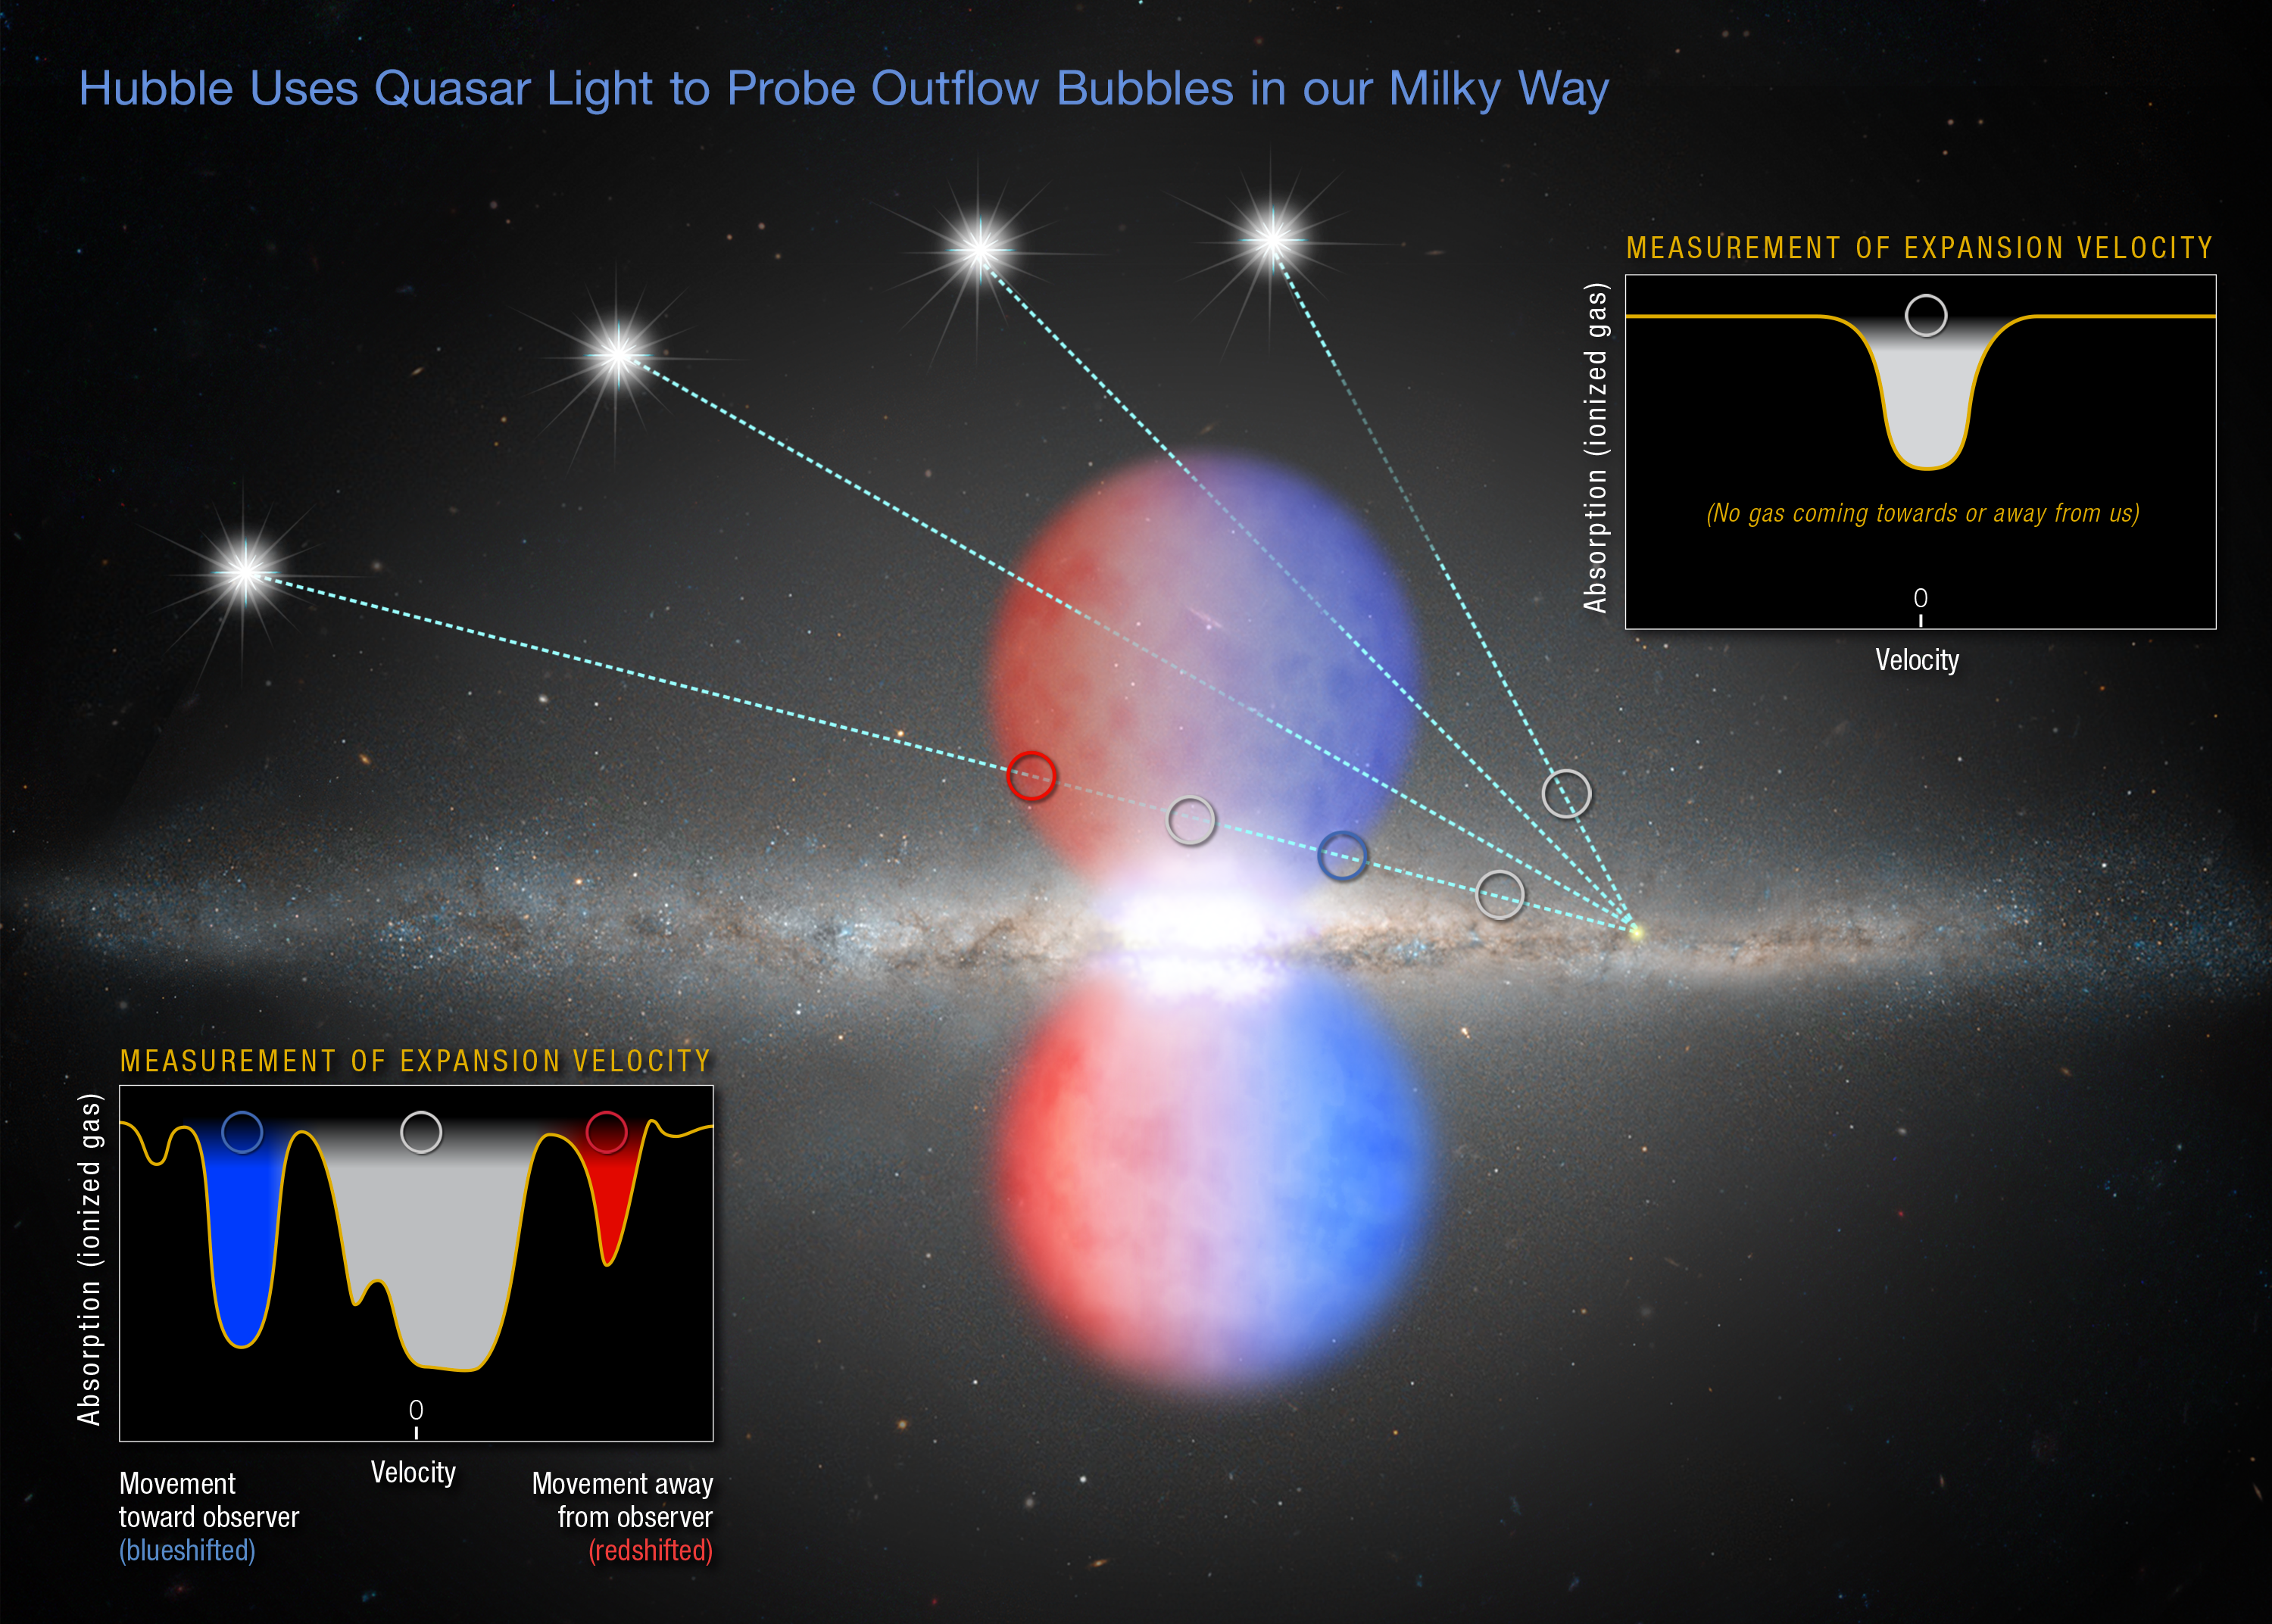

Quasar’s light yields clues to outflow

This artist’s impression shows the light of several distant quasars piercing the northern half of the Fermi Bubbles, an outflow of gas expelled by the supermassive black hole in the centre of the Milky Way. The NASA/ESA Hubble Space Telescope probed the quasars’ light for information on the speed of the gas and whether the gas is moving toward or away from Earth. Based on the material’s speed, the research team estimated that the bubbles formed from an energetic event between 6 million and 9 million years ago.

The inset diagram at bottom left shows the measurement of gas moving toward and away from Earth, indicating the material is traveling at a high velocity.

Hubble also observed light from quasars that passed outside the northern bubble. The box at upper right reveals that the gas in one such quasar’s light path is not moving toward or away from Earth. This gas is in the disc of the Milky Way and does not share the same characteristics as the material probed inside the bubble.

Credit: NASA, ESA, and Z. Levy (STScI)